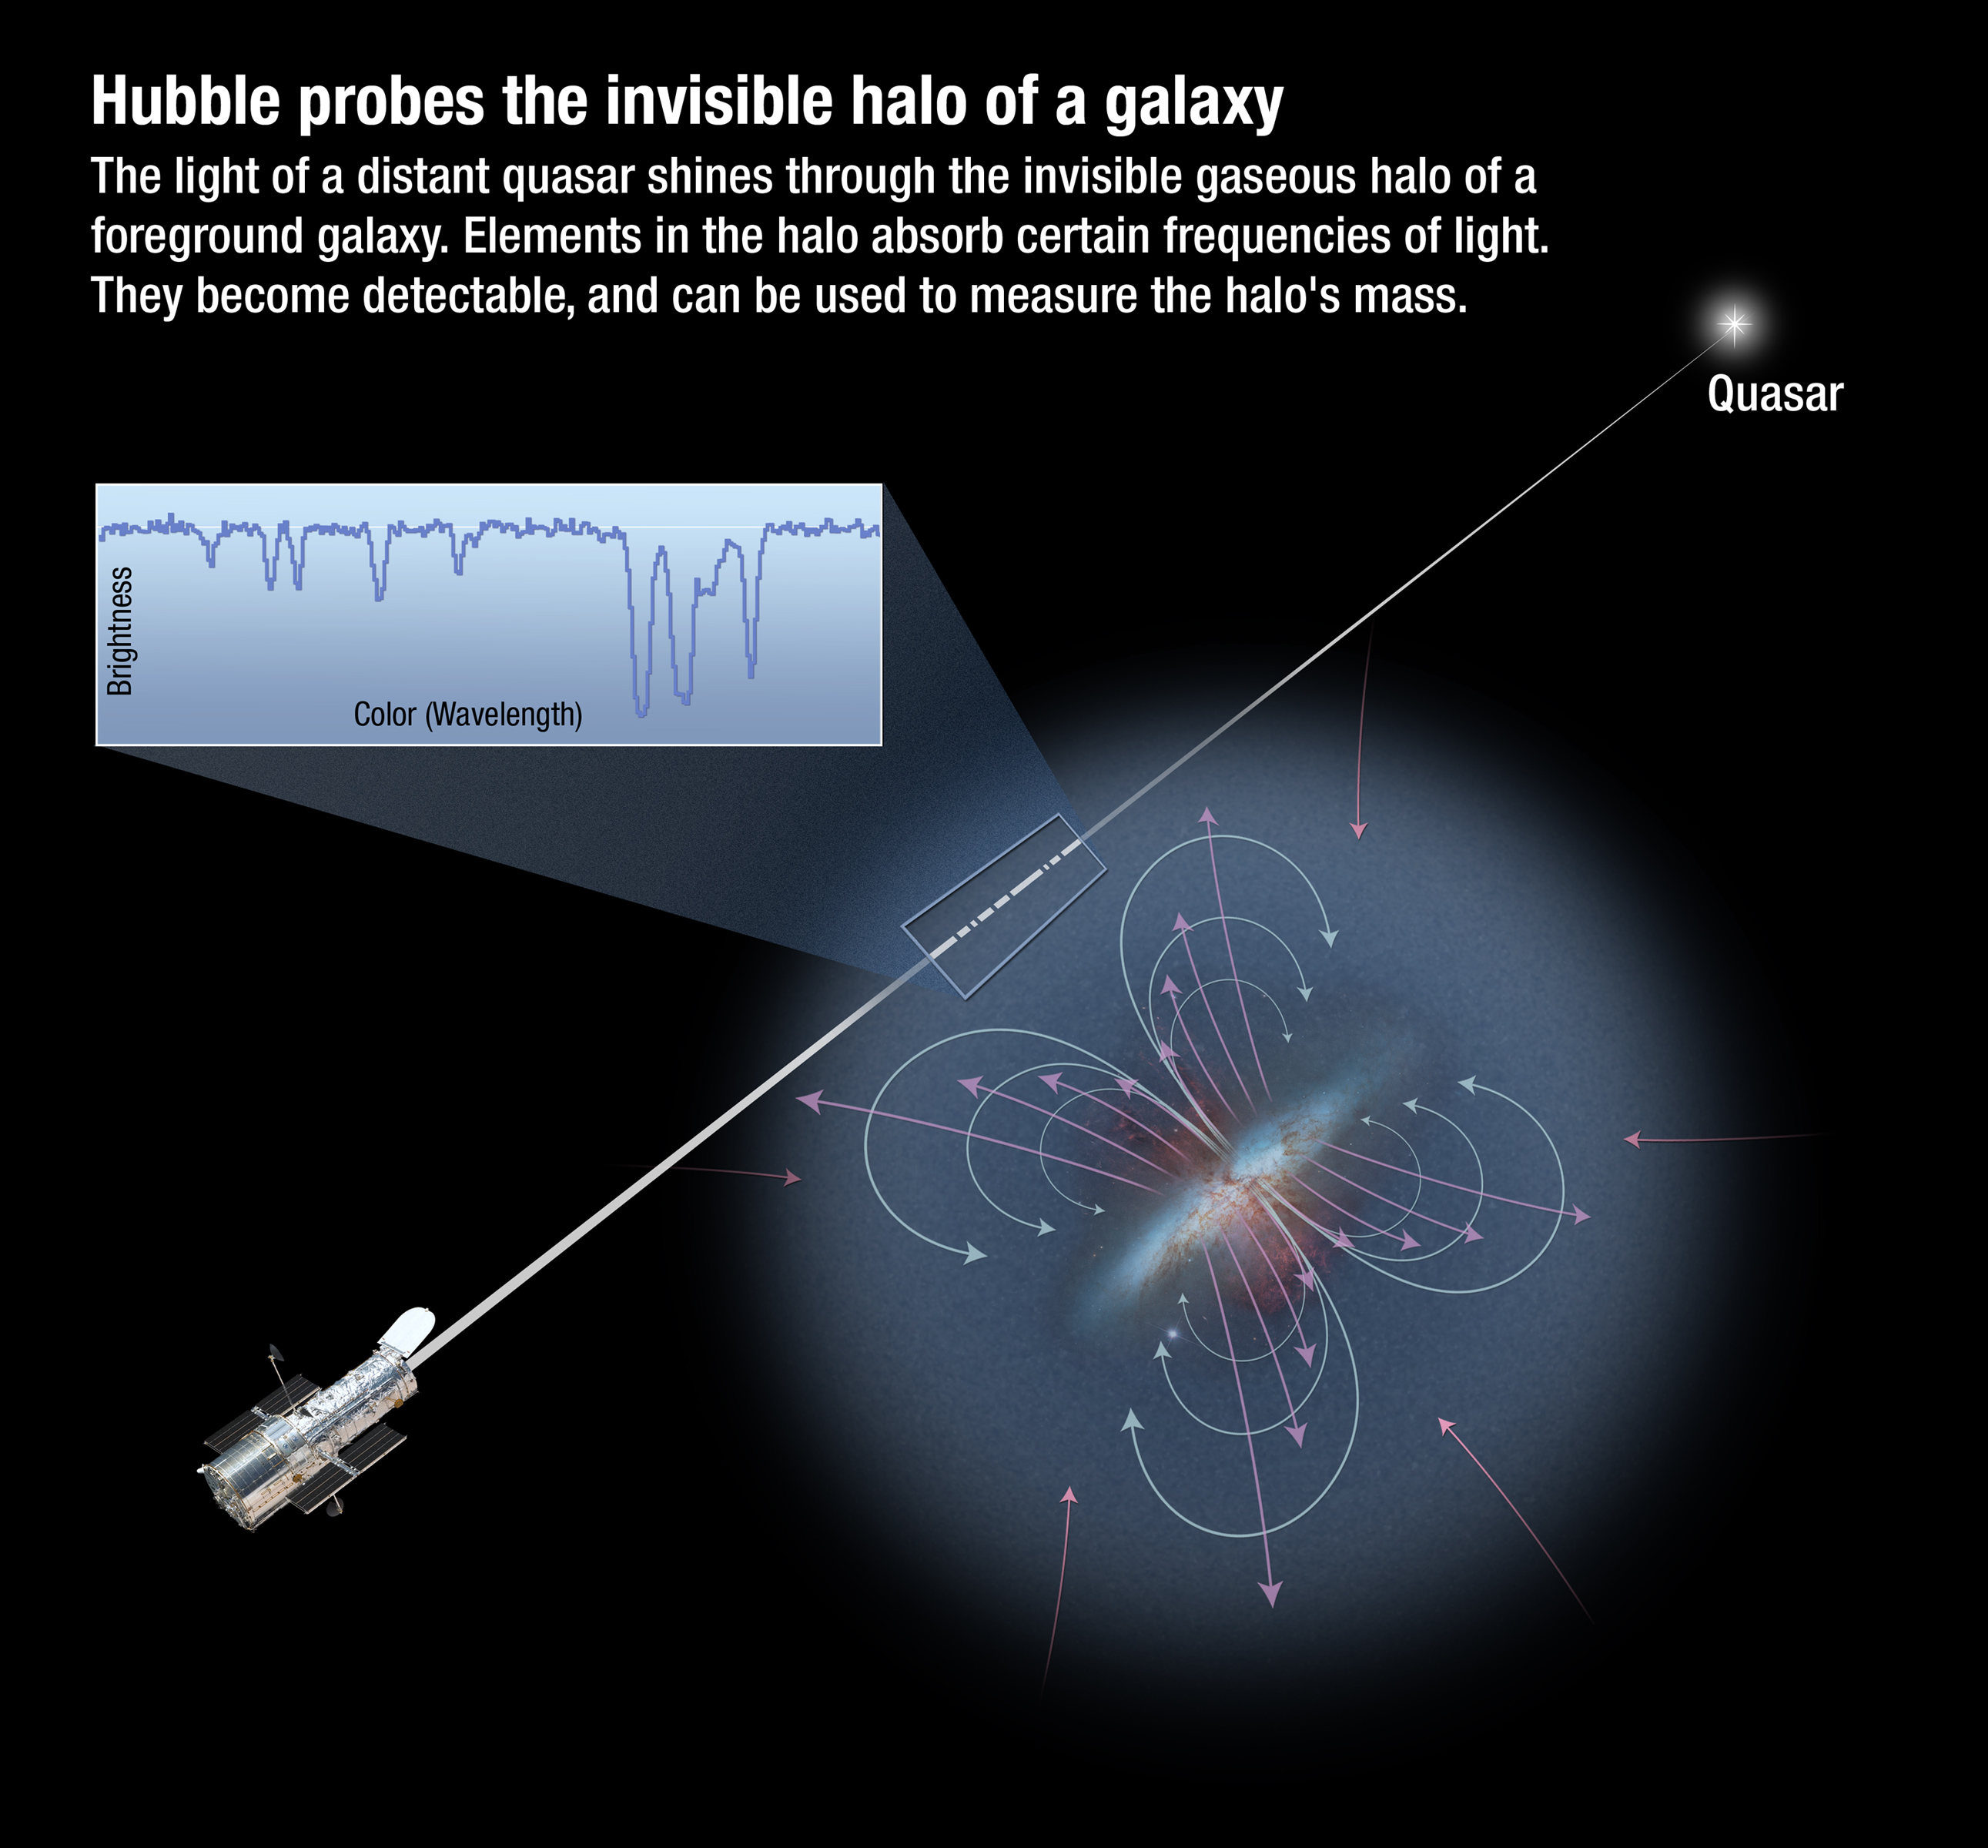

Hubble probes the invisible halo of a galaxy

Distant quasars serve as distant lighthouse beacons that shine through the gas-rich "fog" of hot plasma encircling galaxies. At ultraviolet wavelengths, Hubble's Cosmic Origins Spectrograph (COS) is sensitive to absorption from many ionised heavy elements, such as nitrogen, oxygen, and neon. COS's high sensitivity allows many galaxies that happen to lie in front of the much more distant quasars to be studied. The ionised heavy elements serve as proxies for estimating how much mass is in a galaxy's halo.

Credit: NASA, ESA, and A. Feild (STScI). Science Credit: NASA, ESA, N. Lehner (University of Notre Dame), T. Tripp (University of Massachusetts, Amherst), and J. Tumlinson (STScI)